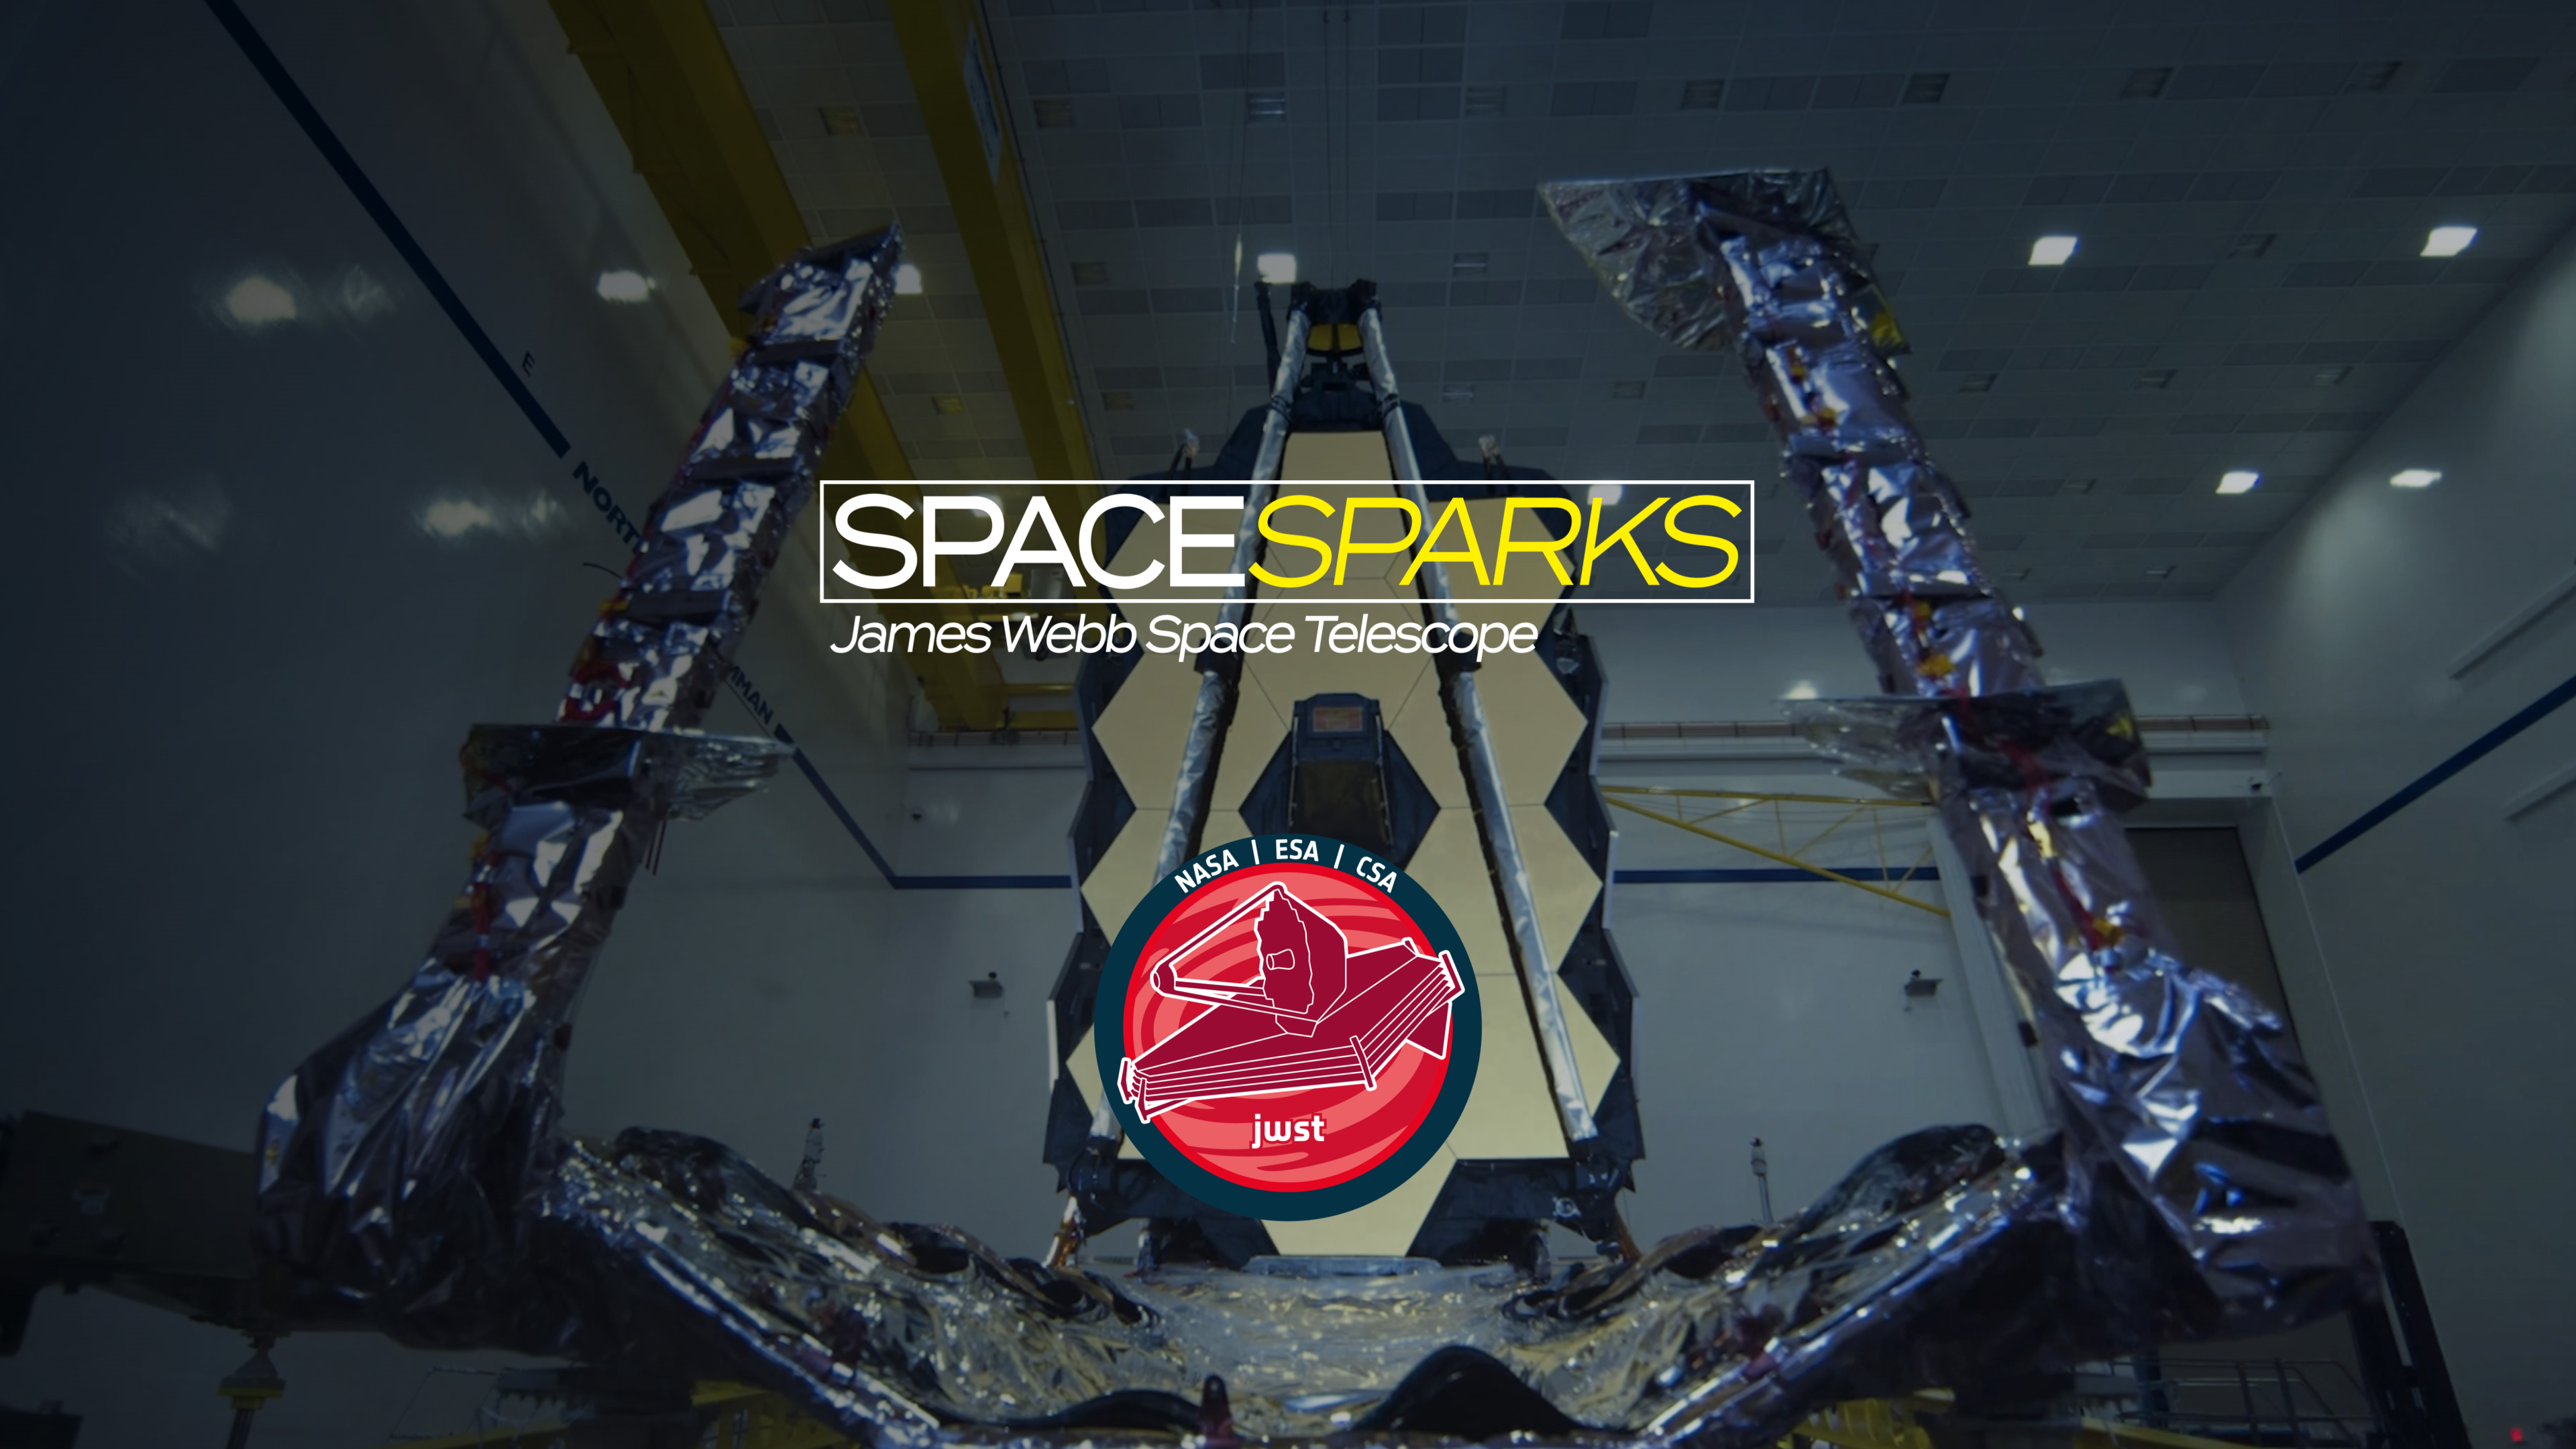

ESA/Webb Space Sparks Title Screen

ESA/Webb Space Sparks Title Screen

Credit: ESA/Webb